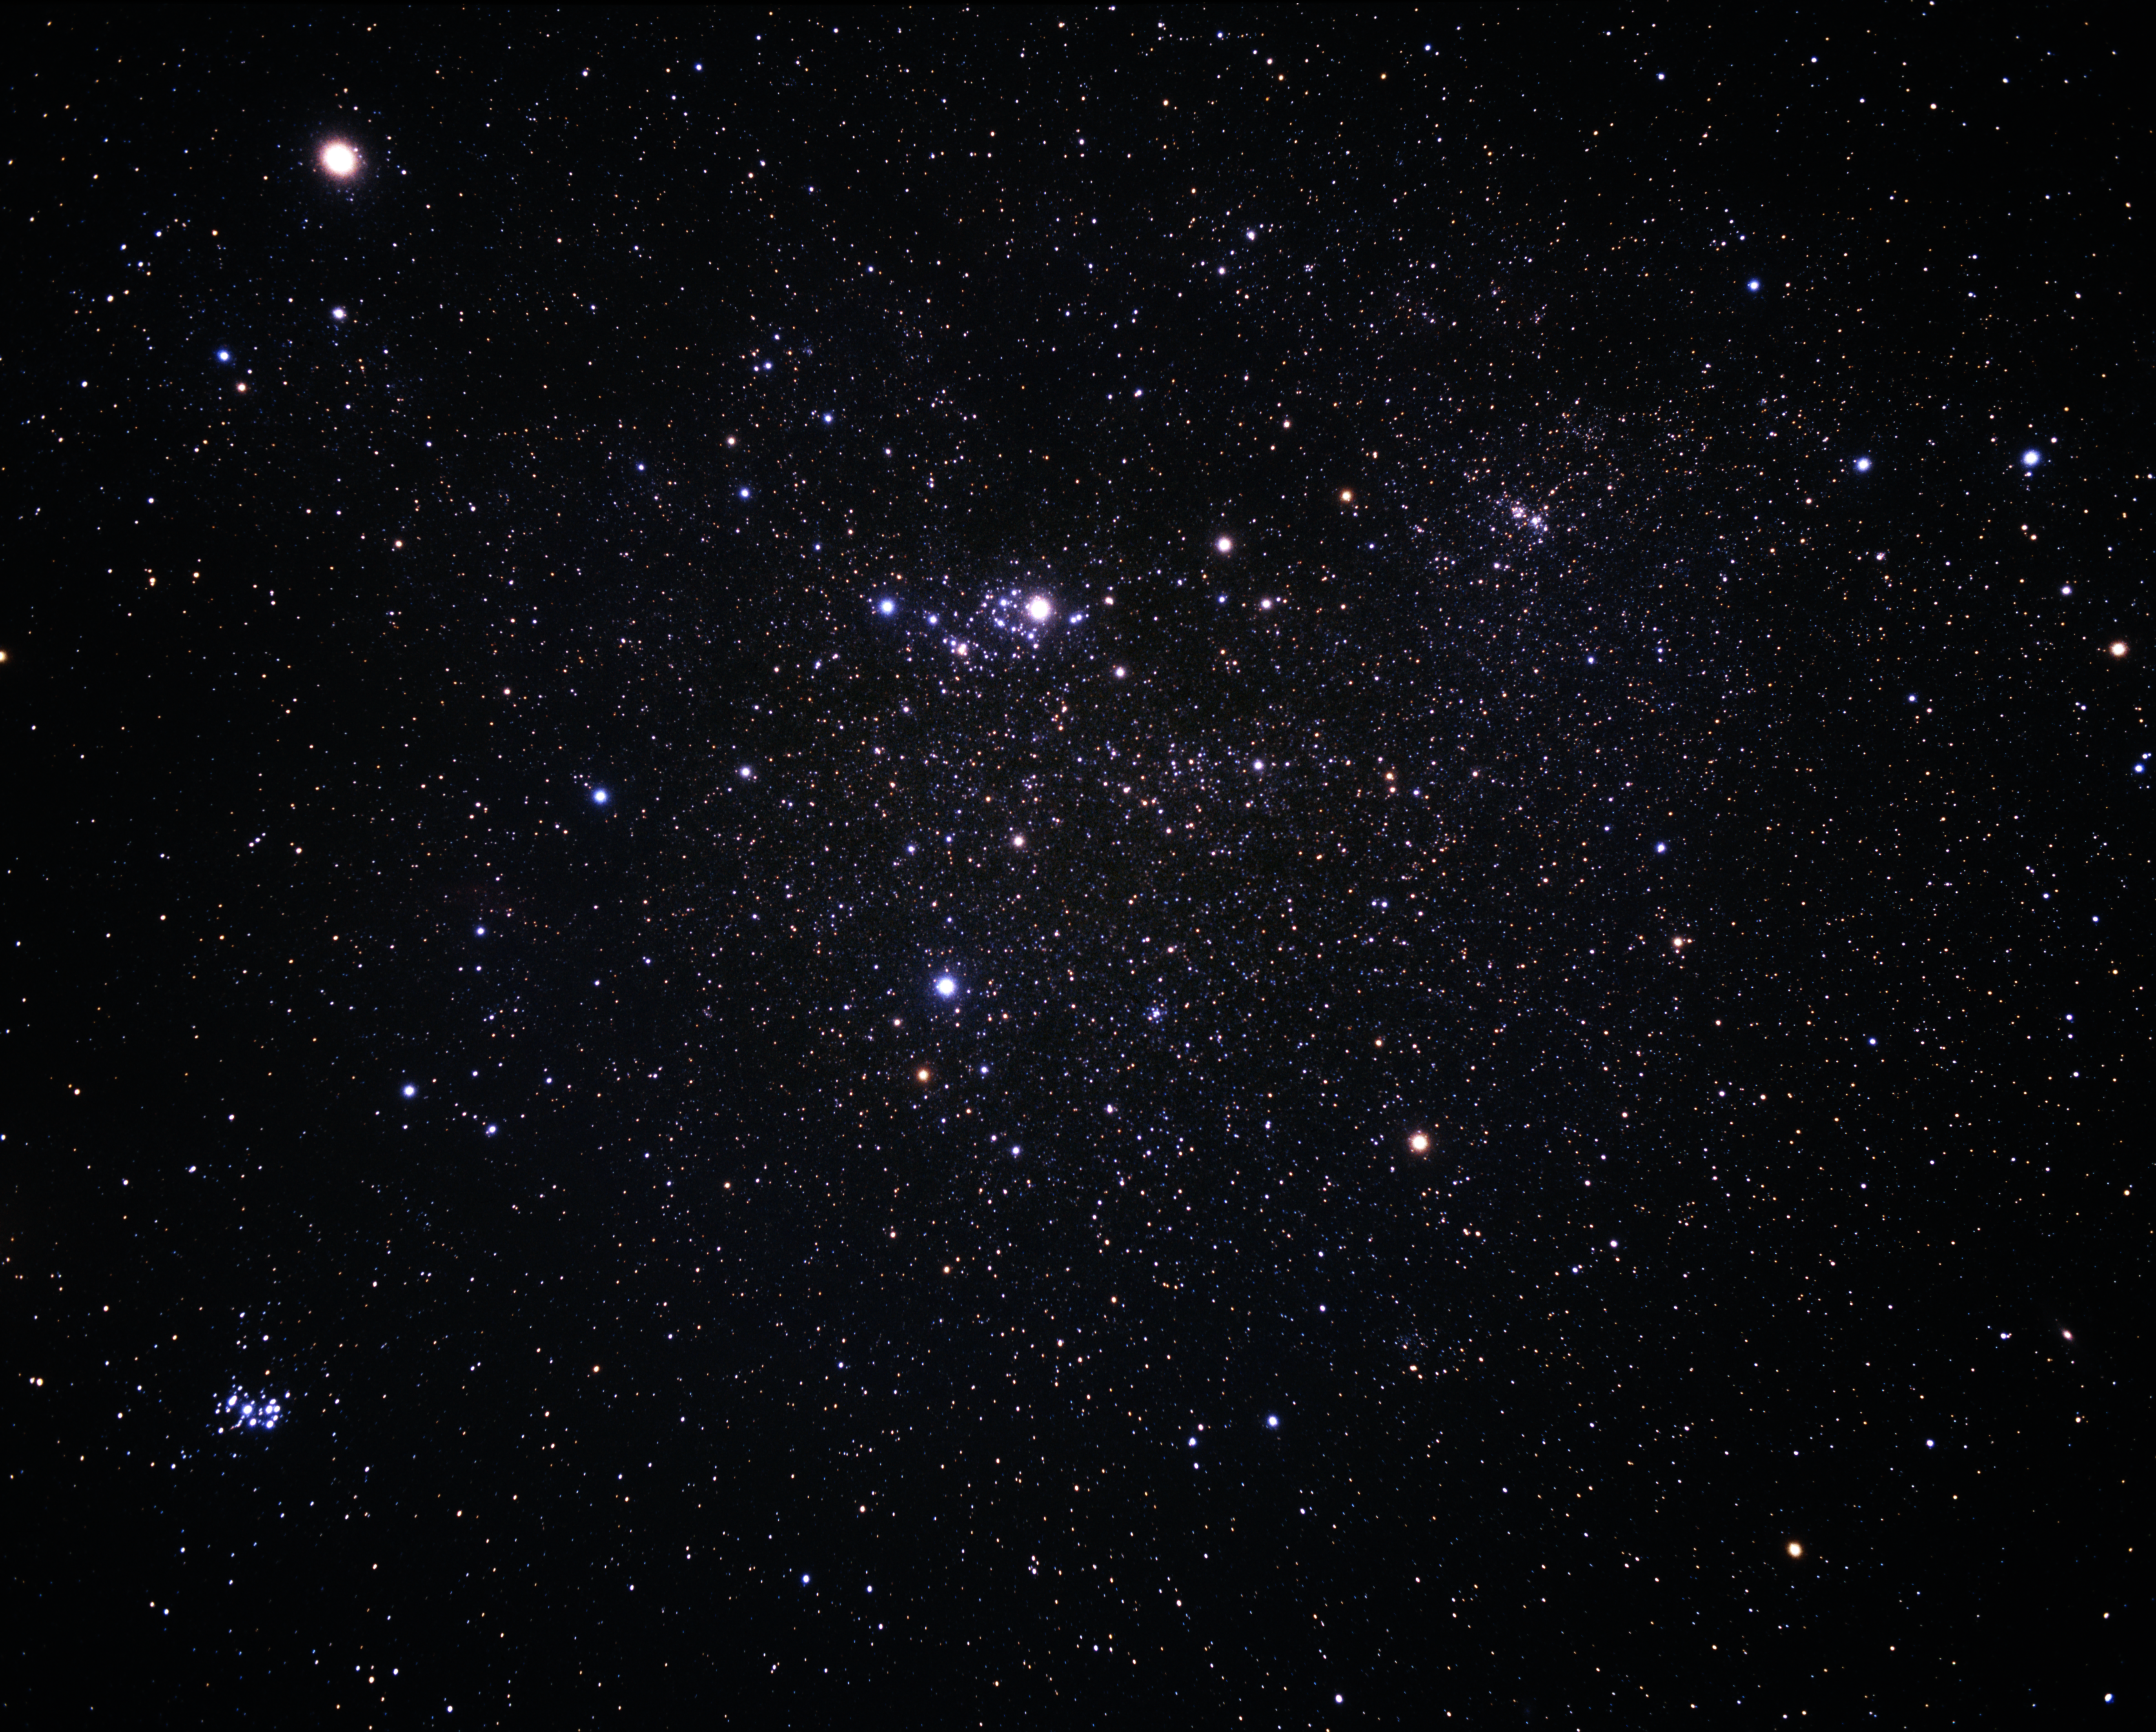

A wide-field image of Perseus (ground-based image)

A wide-field image of the constellation of Perseus imaged from the ground. Note that the comet is not shown in this image.

Credit: A. Fujii